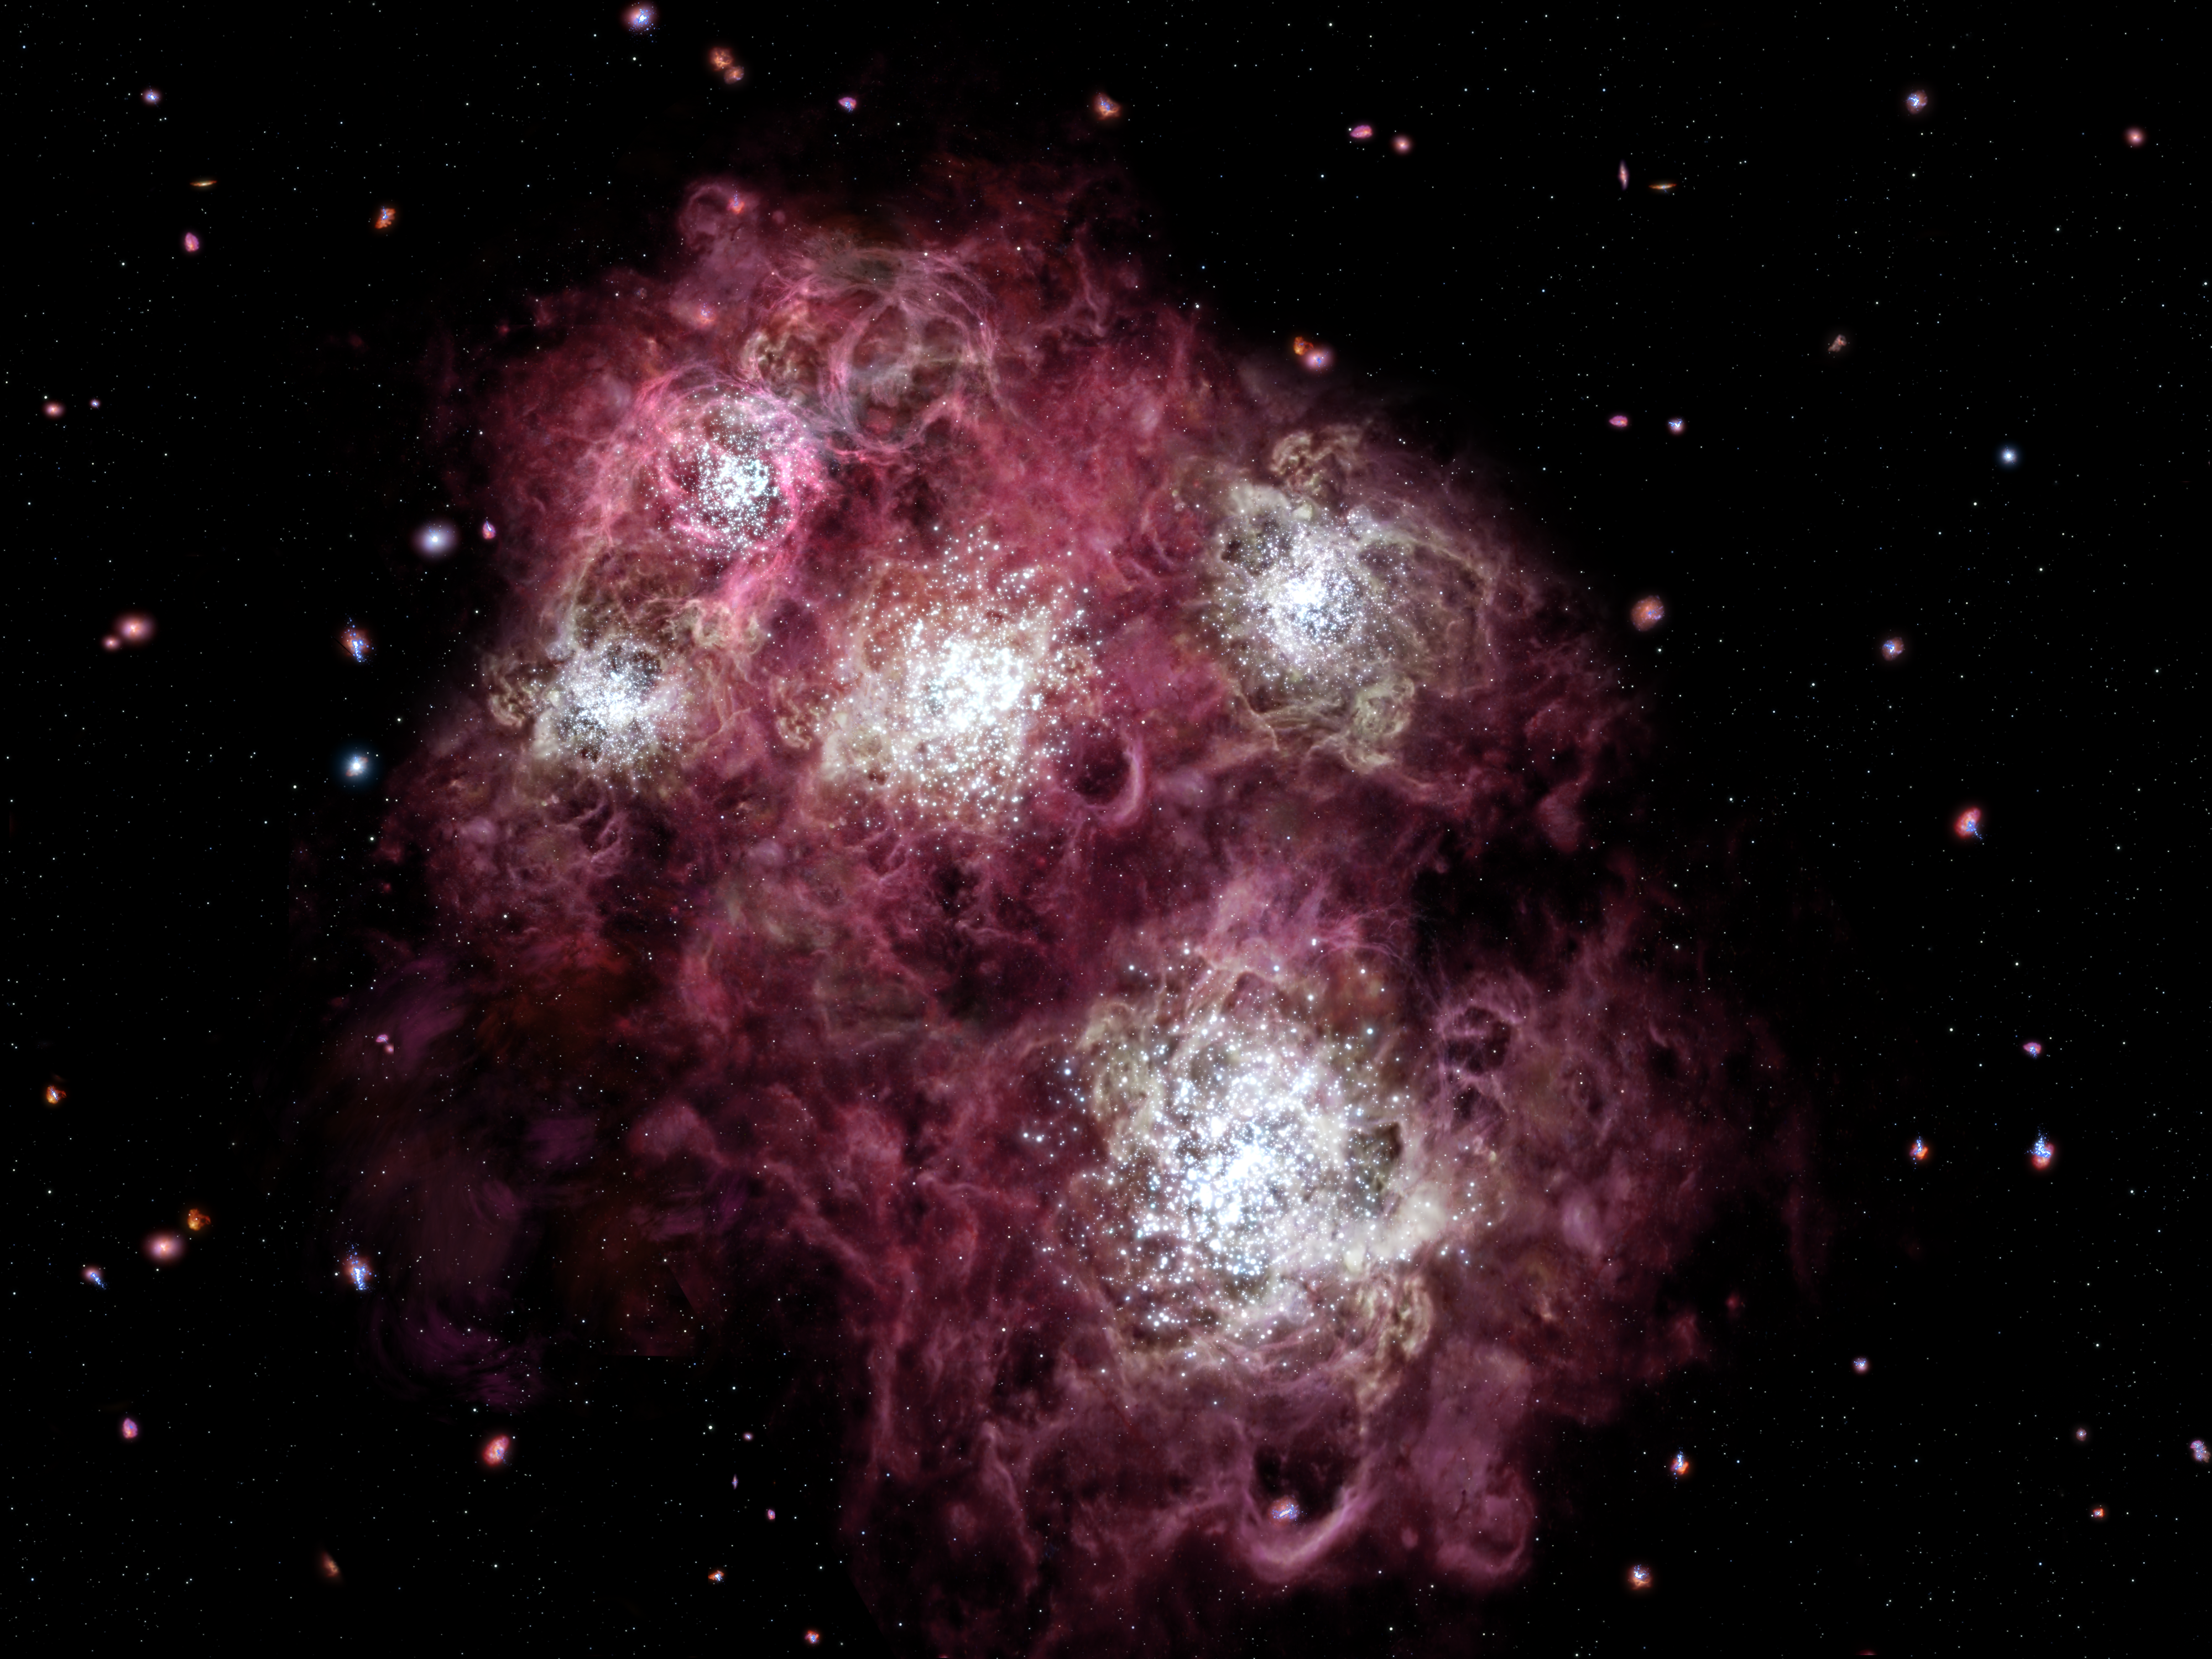

A Young Galaxy Brimming with Star Birth (artist's impression)

This is an artist's impression of an embryonic galaxy brimming with star birth in the early Universe, less than a billion years after the Big Bang. The galaxy is still forming and looks nothing like the majestic spiral and elliptical galaxies that are the near neighbours of our own Milky Way Galaxy.

The illustration shows several tight clusters of stars bursting to life. They are surrounded by glowing bubbles of hydrogen gas produced by massive stars erupting as supernovae. A tapestry of young, developing galaxies is in the background.

The Hubble Space Telescope discovered a young star-forming galaxy like the one in this illustration. The galaxy spied by Hubble was born just 700 million years after the Big Bang.

Credit: NASA, ESA, and G. Bacon (Space Telescope Science Institute)